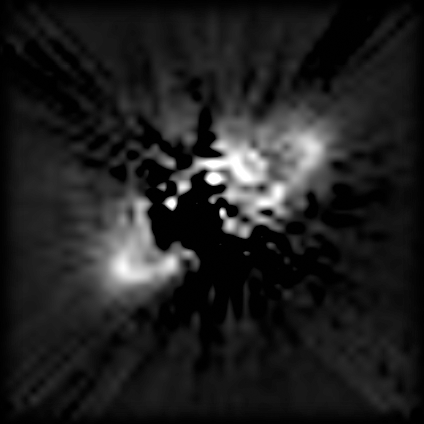

Dust ring around star offers new clues into planet formation

A NASA/ESA Hubble Space Telescope false-color near infrared image of a novel type of structure seen in space - a dust ring around a star. Superficially resembling Saturn's rings -- but on a vastly larger scale -- the 'hula-hoop' around the star called HR 4796A offers new clues into the possible presence of young planets.

Credit: Brad Smith (University of Hawaii), Glenn Schneider (University of Arizona), and NASA/ESA